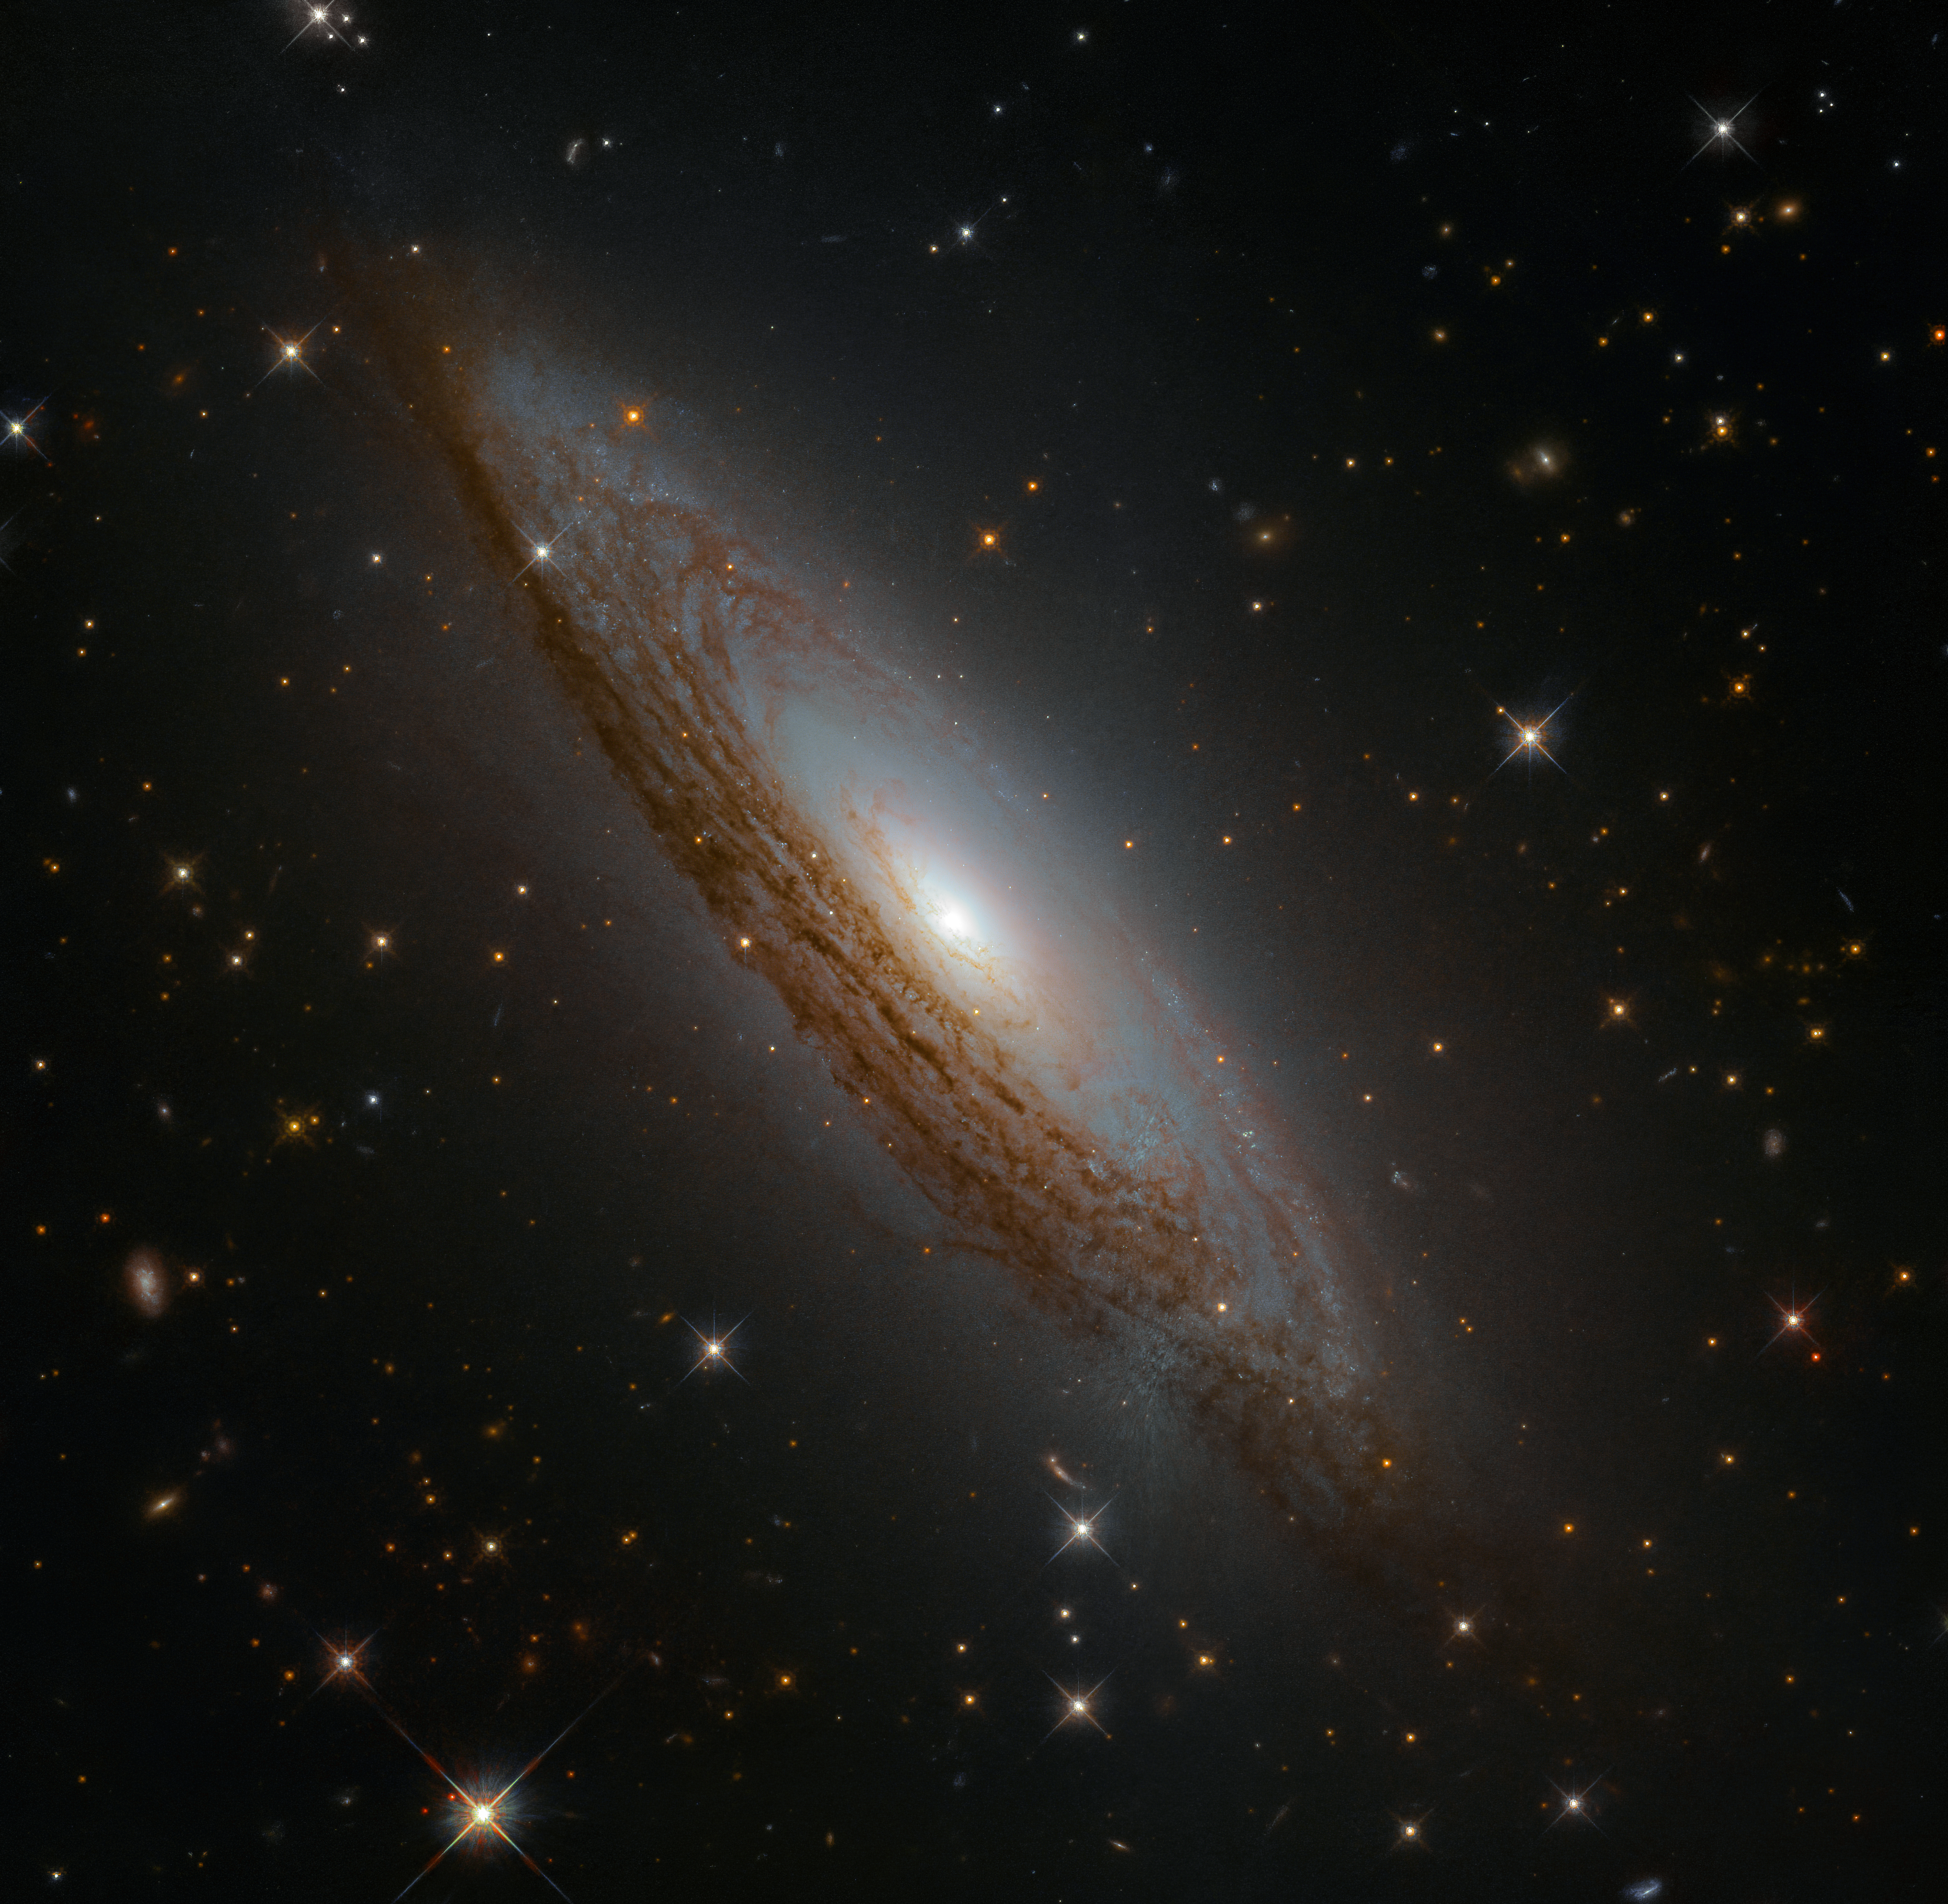

An Active Centre

This swirling mass of celestial gas, dust, and stars is a moderately luminous spiral galaxy named ESO 021-G004, located just under 130 million light-years away.

This galaxy has something known as an active galactic nucleus. While this phrase sounds complex, this simply means that astronomers measure a lot of radiation at all wavelengths coming from the centre of the galaxy. This radiation is generated by material falling inwards into the very central region of ESO 021-G004, and meeting the behemoth lurking there — a supermassive black hole. As material falls towards this black hole it is dragged into orbit as part of an accretion disc; it becomes superheated as it swirls around and around, emitting characteristic high-energy radiation until it is eventually devoured.

The data comprising this image were gathered by the Wide Field Camera 3 aboard the NASA/ESA Hubble Space Telescope.

Credit: ESA/Hubble & NASA, D. Rosario et al.